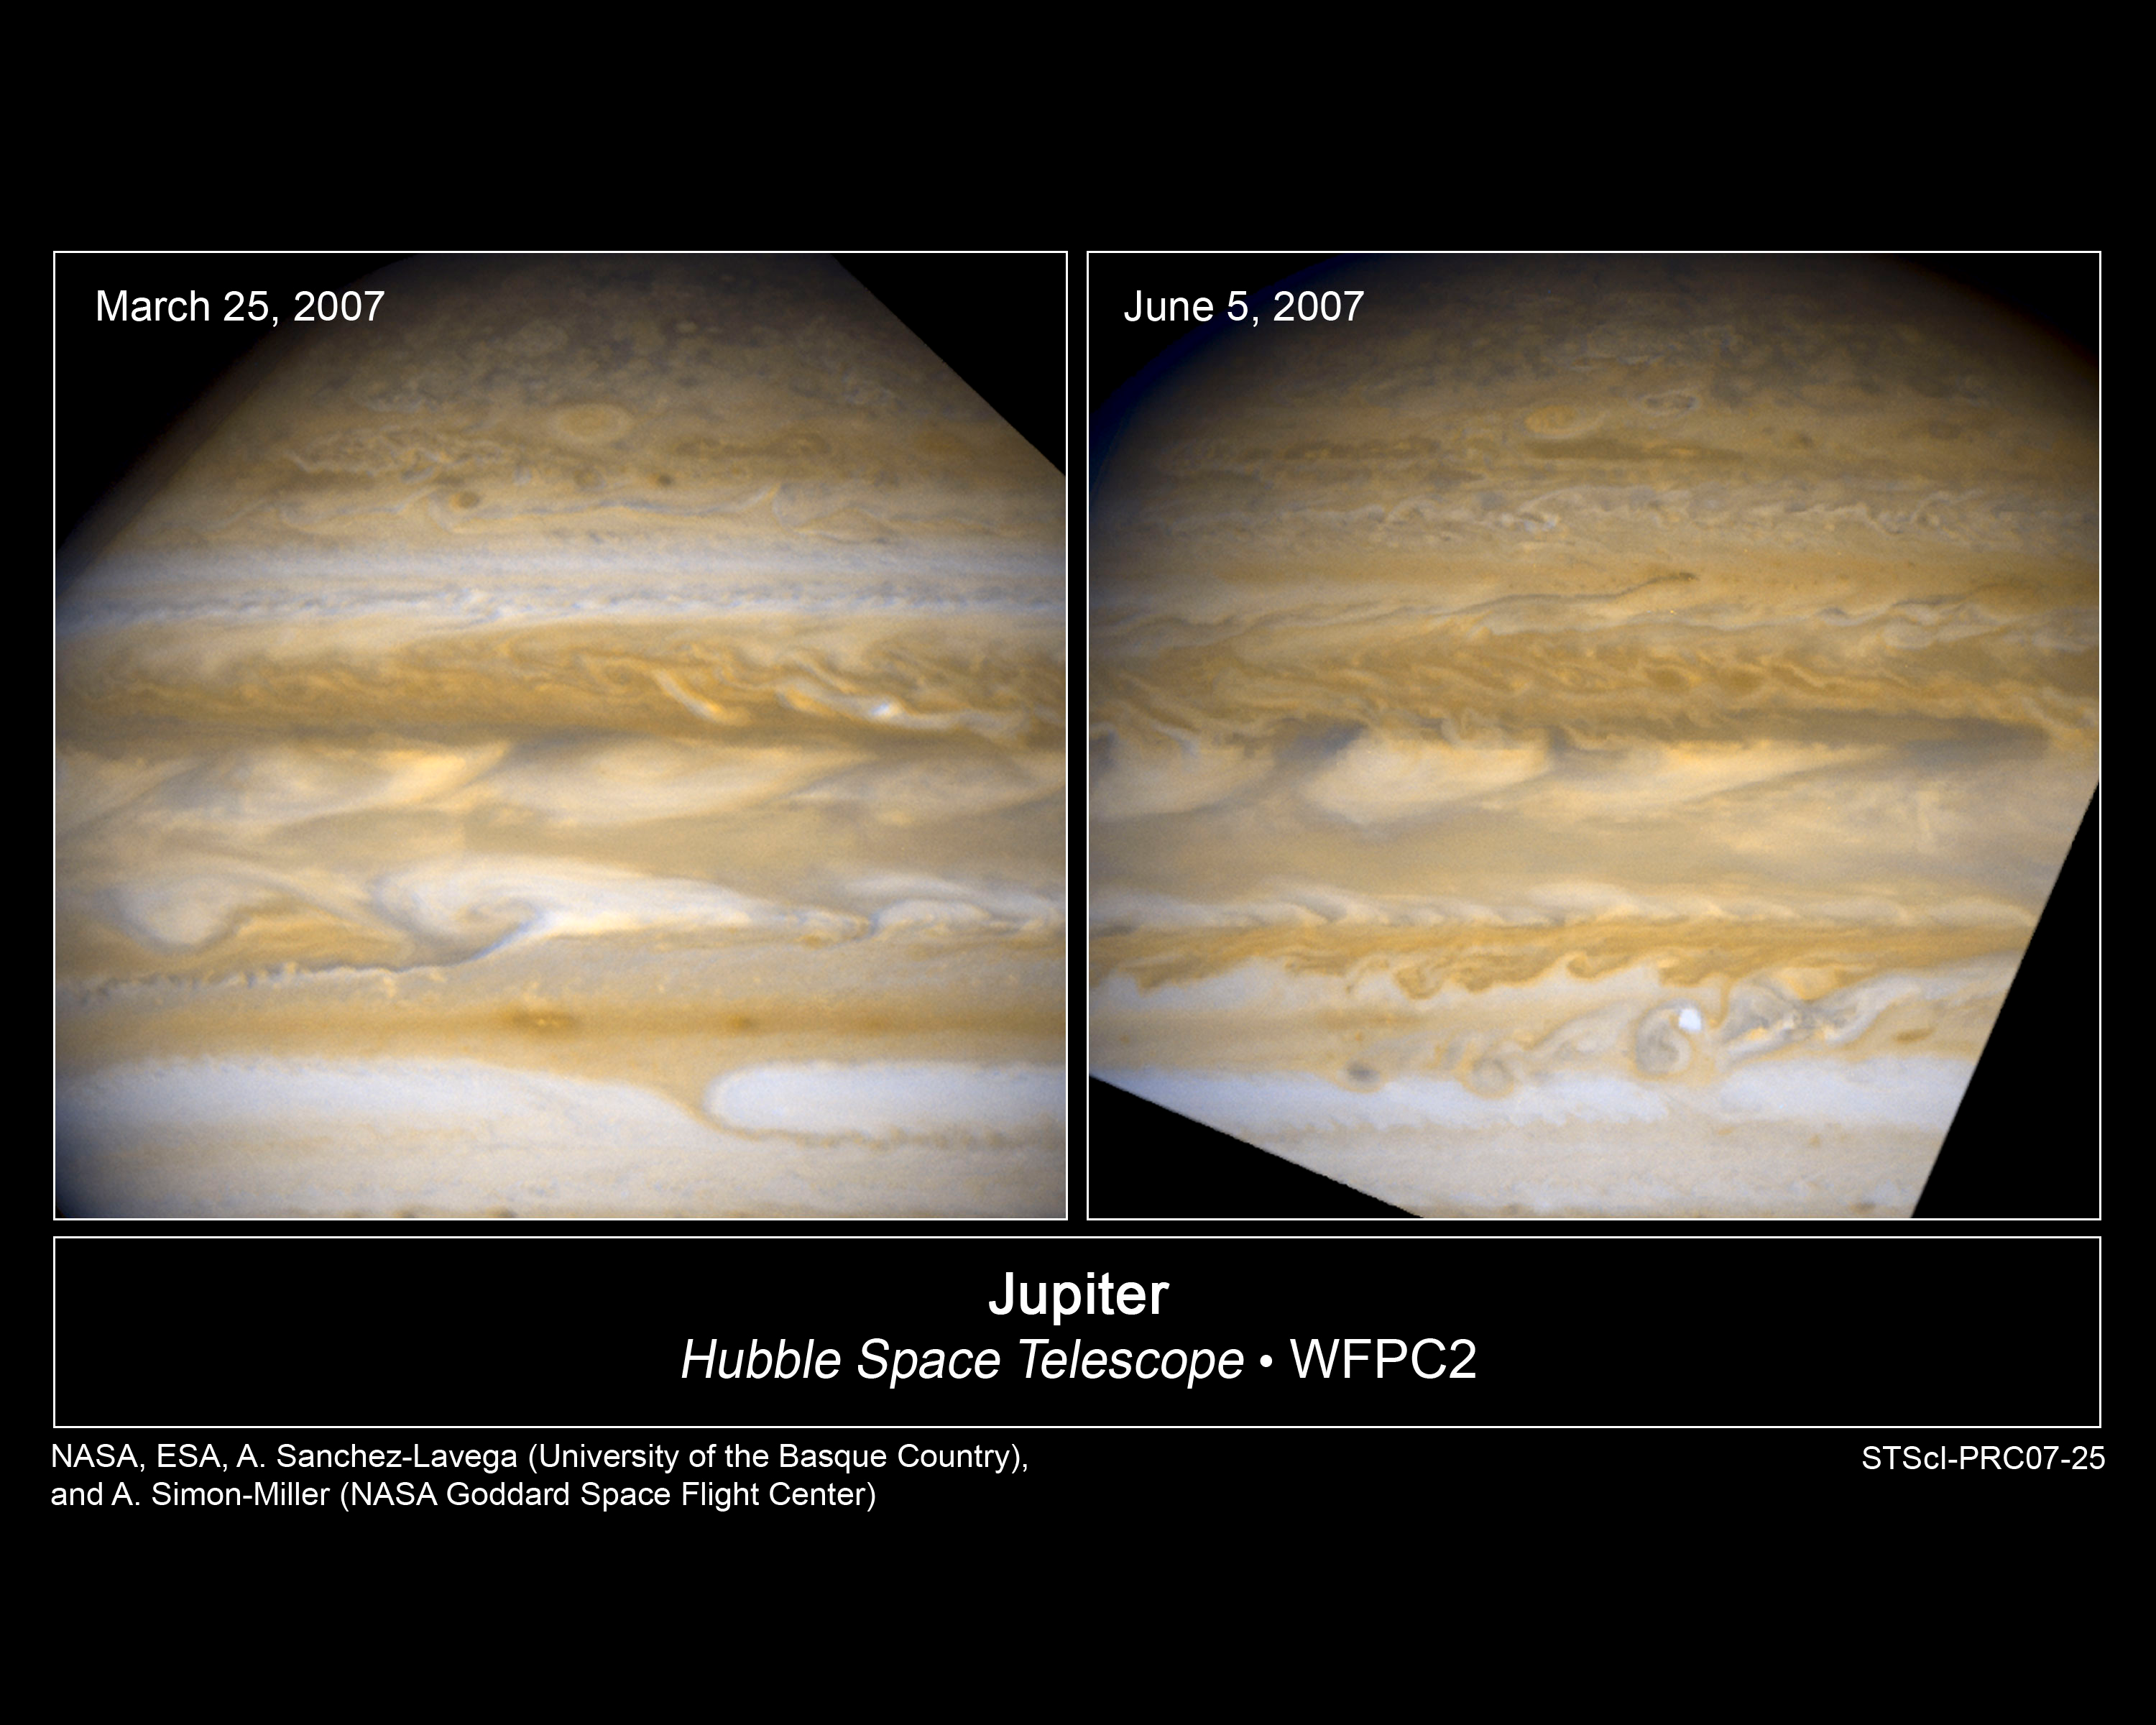

Hubble Catches Jupiter Changing Its Stripes

Massive Jupiter is undergoing dramatic atmospheric changes that have never been seen before with the keen "eye" of NASA/ESA Hubble Space Telescope.

Credit: NASA, ESA, A. Simon-Miller (NASA Goddard Space Flight Center), A. Sÿnchez-Lavega, R. Hueso, and S. Pérez-Hoyos (University of the Basque Country), E. García-Melendo (Esteve Duran Observatory Foundation, Spain), and G. Orton (Jet Propulsion Laboratory)